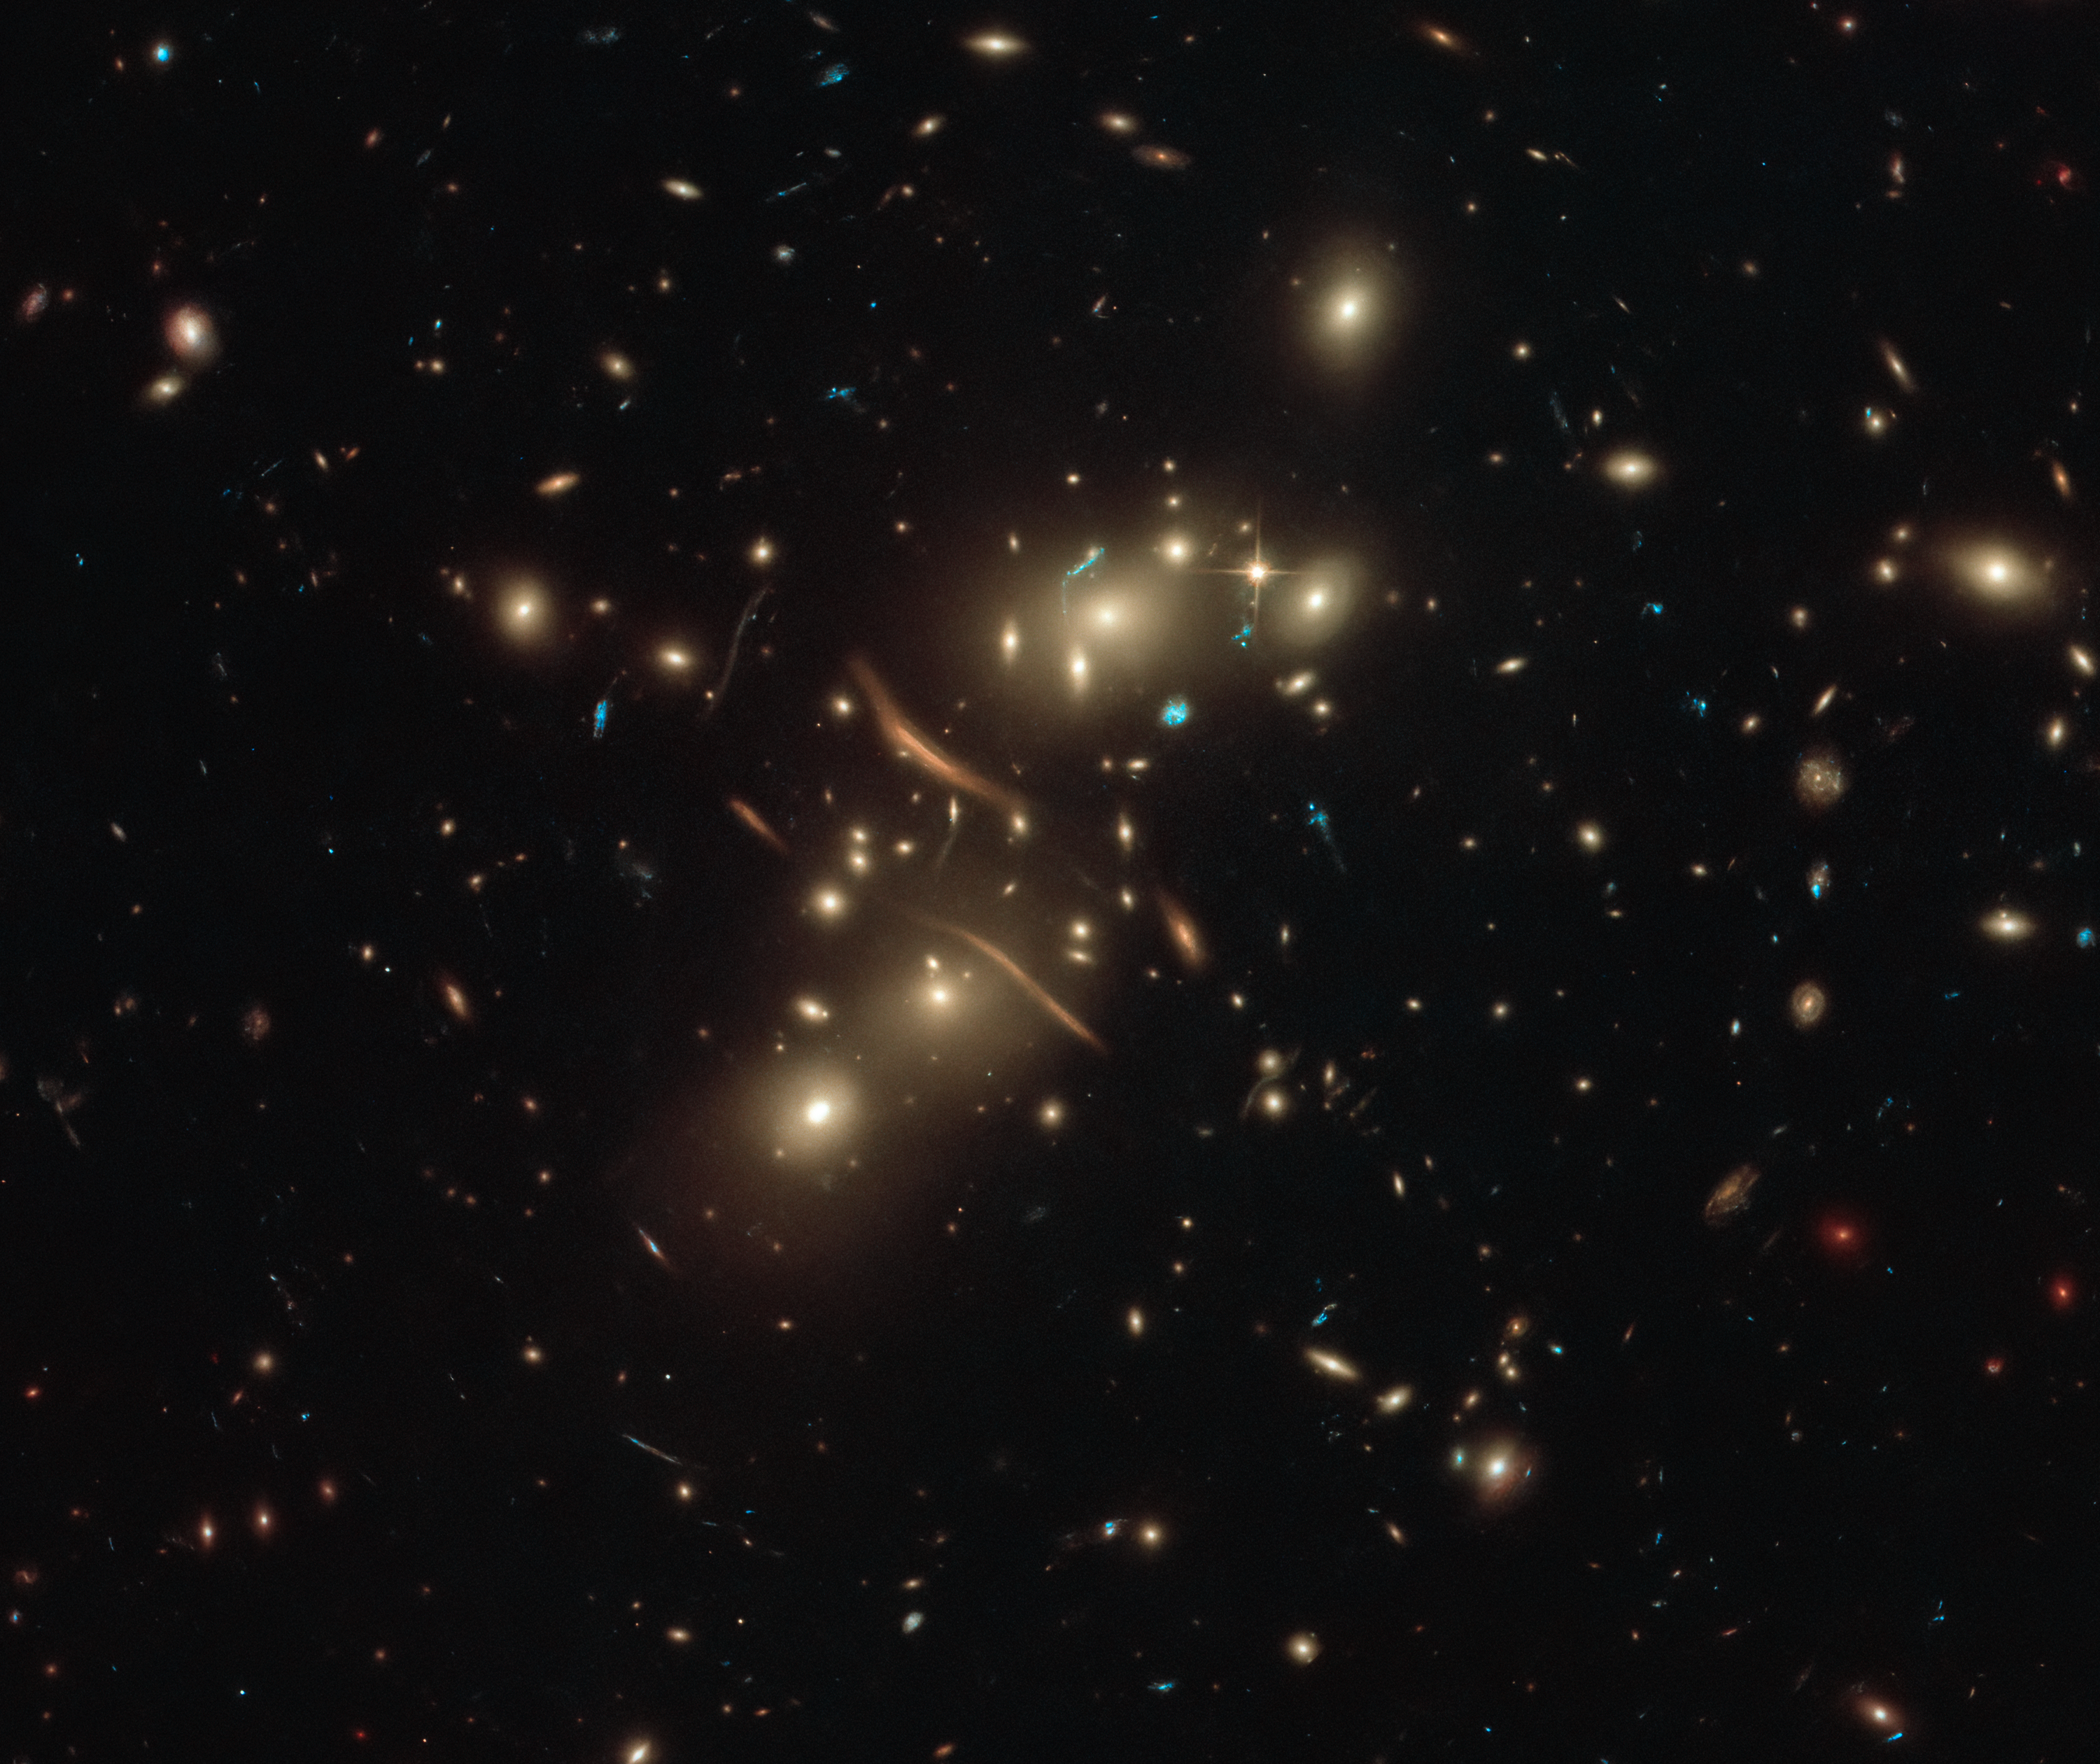

Light Bends from the Beyond

This extraordinary image from the NASA/ESA Hubble Space Telescope of the galaxy cluster Abell 2813 (also known as ACO 2813) has an almost delicate beauty, which also illustrates the remarkable physics at work within it. The image spectacularly demonstrates the concept of gravitational lensing.

In amongst the tiny dots, spirals and ovals that are the galaxies that belong to the cluster, there are several distinct crescent shapes. These curved arcs of light are strong examples of a phenomenon known as gravitational lensing. The image was compiled using observations taken with the Hubble Space Telescope’s Advanced Camera for Surveys (ACS) and Wide Field Camera 3 (WFC3).

Gravitational lensing occurs when an object’s mass causes light to bend. The curved crescents and s-shapes of light in this image are not curved galaxies, but are light from galaxies that actually lie beyond Abell 2813. The galaxy cluster has so much mass that it acts as a gravitational lens, causing light from more distant galaxies to bend around it. These distortions can appear as many different shapes, such as long lines or arcs.

This very visual evidence that mass causes light to bend has been famously used as a proof of one of the most famous scientific theories: Einstein’s theory of general relativity.

Credit: ESA/Hubble & NASA, D. Coe